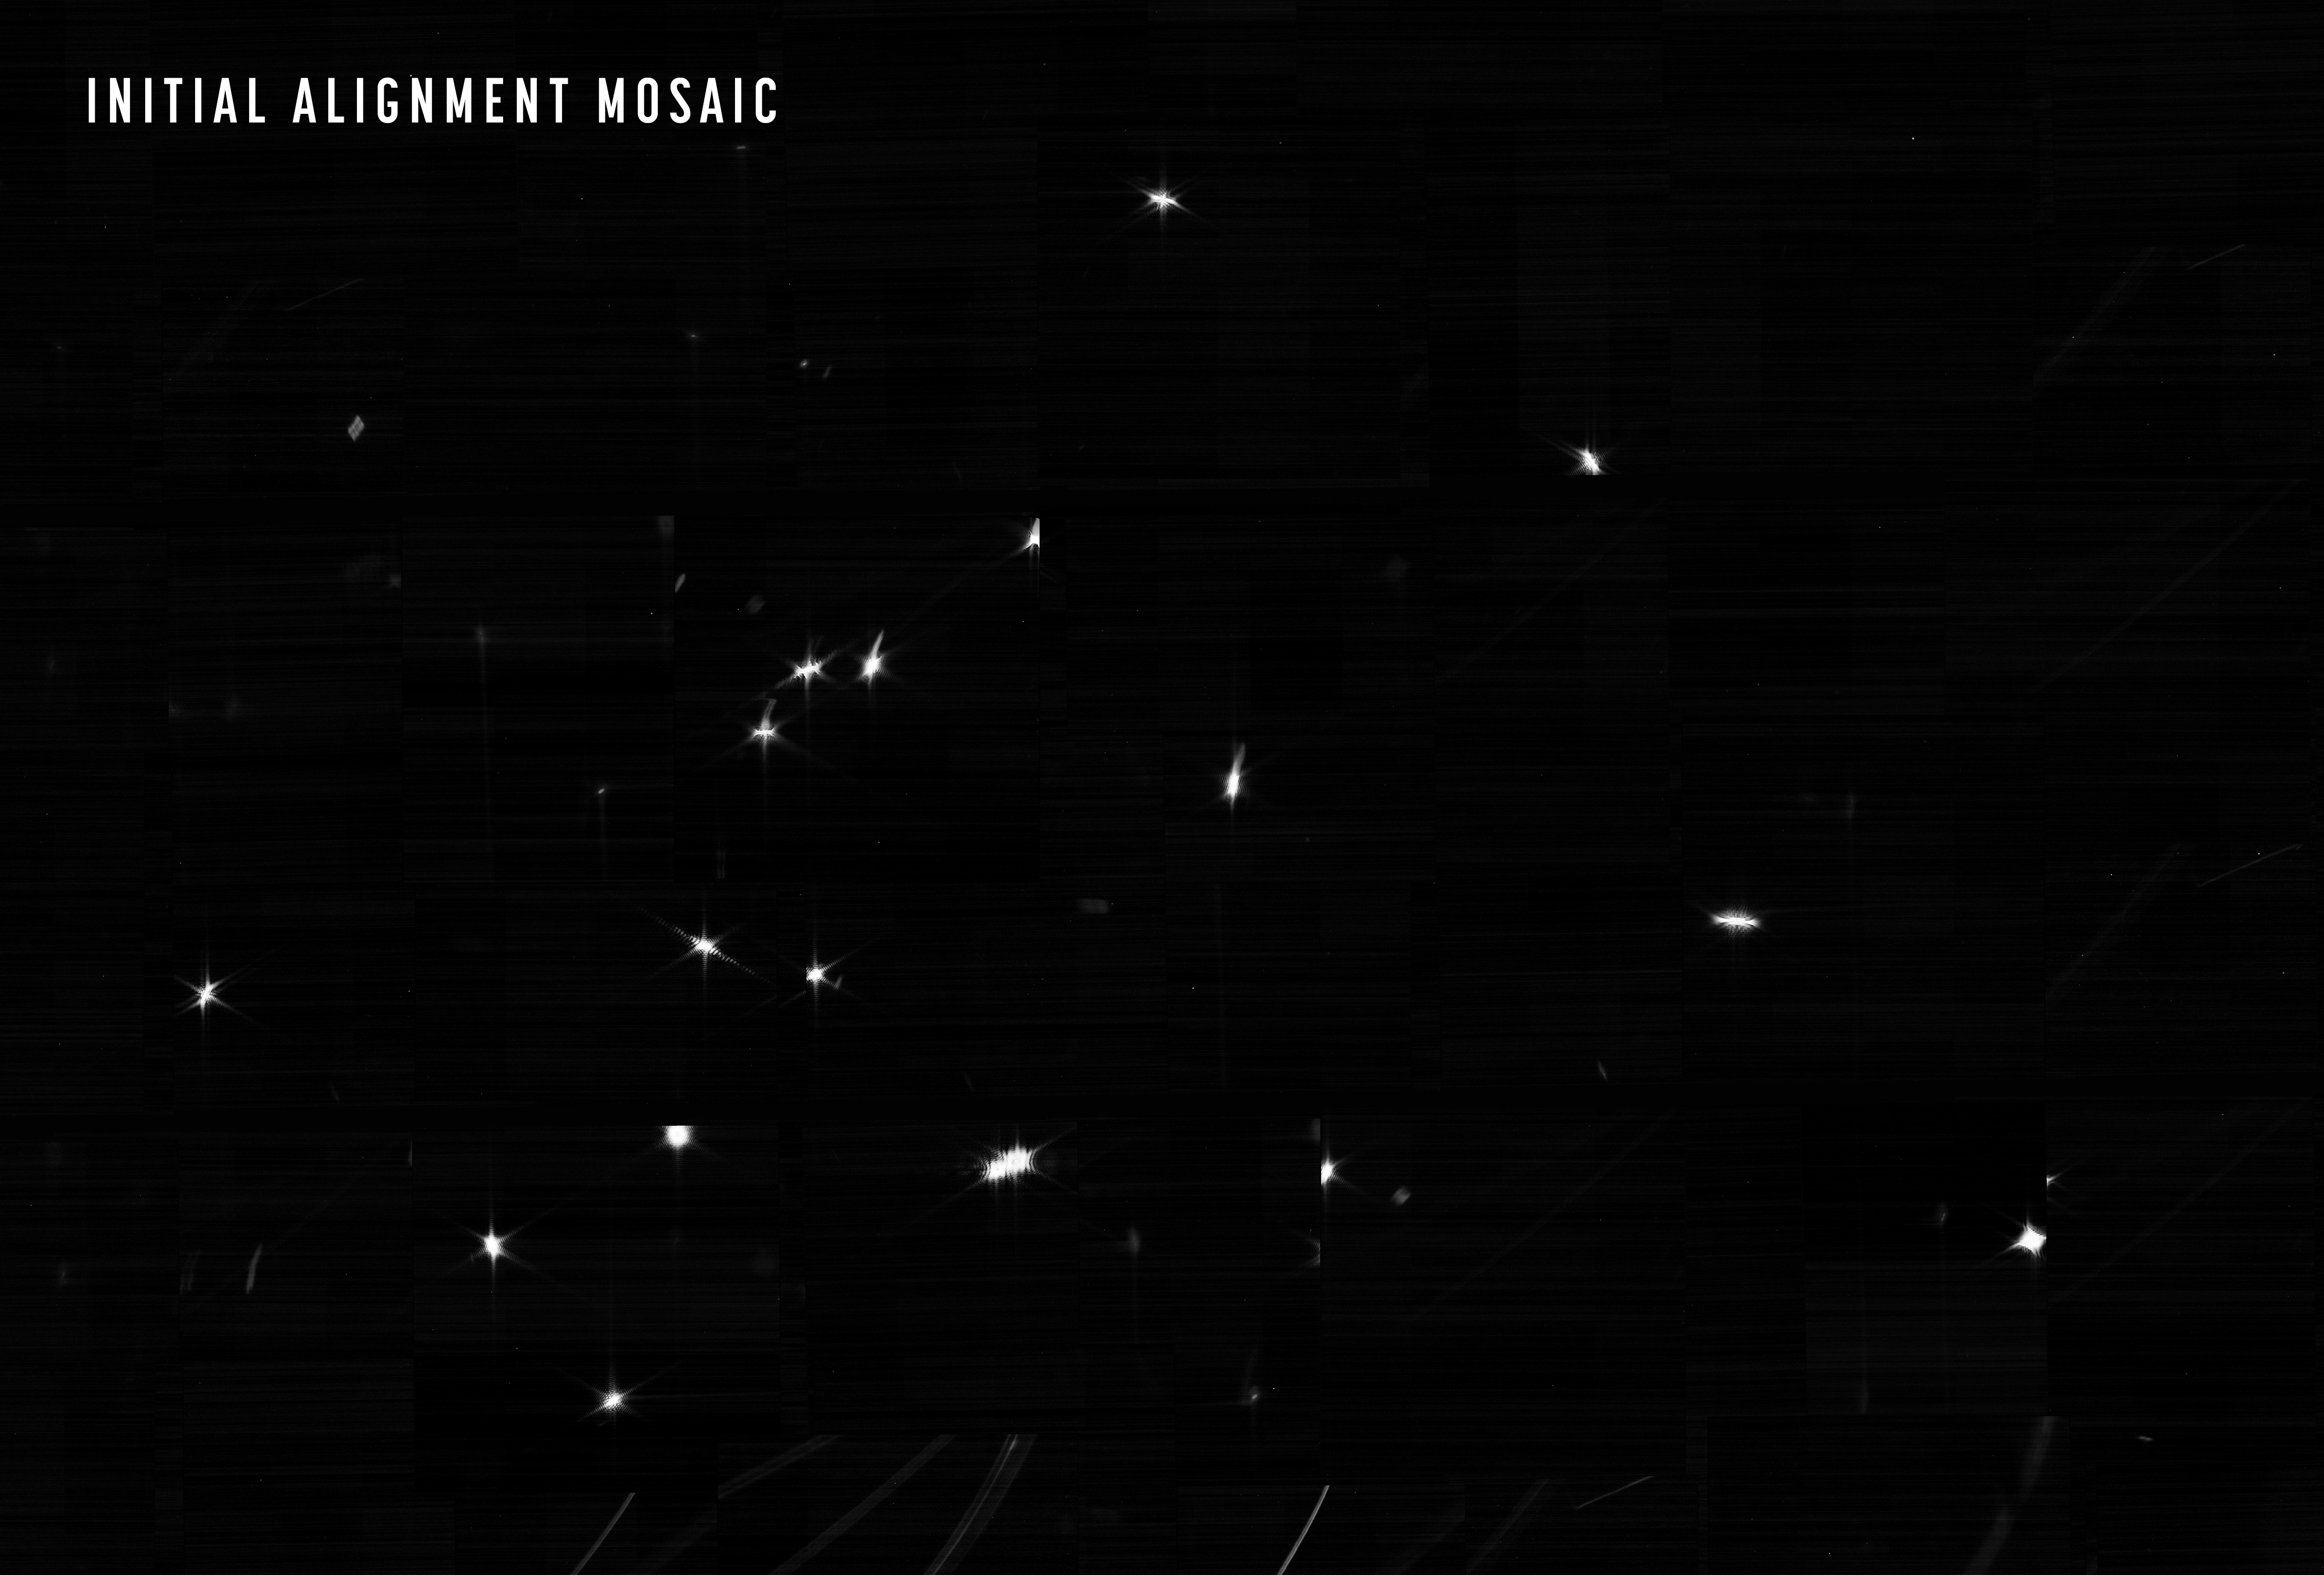

Photons Received

The NASA/ESA/CSA James Webb Space Telescope is nearing completion of the first phase of the months-long process of aligning the observatory’s primary mirror using the Near Infrared Camera (NIRCam) instrument.

The team’s challenge was twofold: confirm that NIRCam was ready to collect light from celestial objects, and then identify starlight from the same star in each of the 18 primary mirror segments. The result is an image mosaic of 18 randomly organised dots of starlight, the product of Webb’s unaligned mirror segments all reflecting light from the same star back at Webb’s secondary mirror and into NIRCam’s detectors.

What looks like a simple image of blurry starlight now becomes the foundation to align and focus the telescope in order for Webb to deliver unprecedented views of the universe this summer. Over the next month or so, the team will gradually adjust the mirror segments until the 18 images become a single star.

During the image capturing process that began on 2 February, Webb was repointed to 156 different positions around the predicted location of the star and generated 1560 images using NIRCam’s 10 detectors, amounting to 54 gigabytes of raw data. The entire process lasted nearly 25 hours, but notedly the observatory was able to locate the target star in each of its mirror segments within the first six hours and 16 exposures. These images were then stitched together to produce a single, large mosaic that captures the signature of each primary mirror segment in one frame. The images shown here are only a center portion of that larger mosaic, a huge image with over 2 billion pixels.

Each unique dot visible in the image mosaic is the same star as imaged by each of Webb’s 18 primary mirror segments, a treasure trove of detail that optics experts and engineers will use to align the entire telescope. This activity determined the post-deployment alignment positions of every mirror segment, which is the critical first step in bringing the entire observatory into a functional alignment for scientific operations.

Credit: NASA